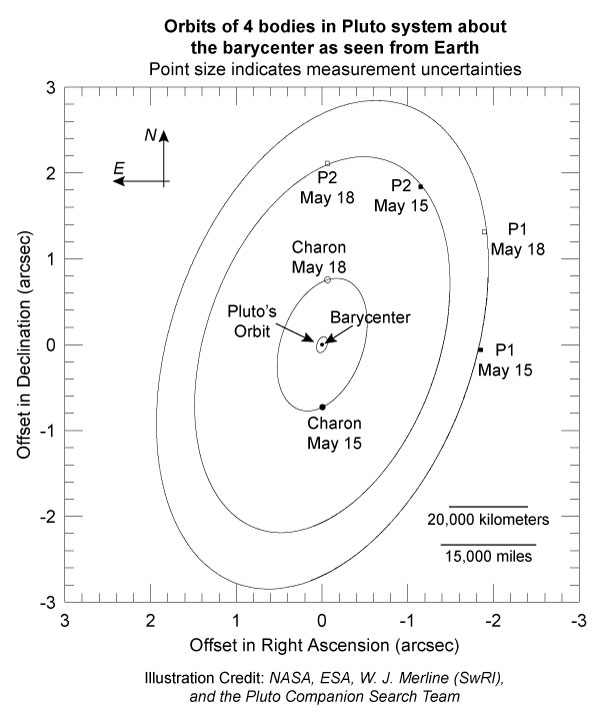

Orbits of 4 bodies in Pluto system about Barycenter as seen from Earth

Although a full orbital solution for the satellites cannot be determined from only two Hubble measurements, it turns that their paths closely follow that expected for objects orbiting the Pluto system's barycenter in a perfect circle in the same plane as Charon's orbit. In this diagram, the barycenter is the dot in the center, Pluto's orbit is the smallest ellipse, Charon's orbit is the next ellipse (its position on May 15 and May 18 are indicated by the filled and open circles, respectively), an orbit that is consistent with P2's measured positions is next, followed by an orbit that is consistent with P1's measured positions. For both of the latter cases, the filled squares are positions on May 15 and open squares are positions on May 18. Note that projection effects cause these circular orbits to look elliptical on the plane of the sky.

Credit: NASA, ESA, W. J. Merline (SwRI), and the Pluto Companion Search Team